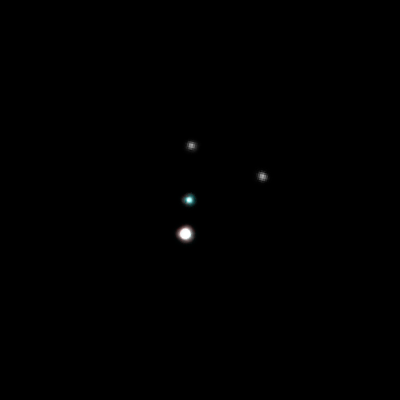

The Pluto system on May 18, 2005

These Hubble Space Telescope images, taken by the Advanced Camera for Surveys, reveal Pluto, its large moon Charon, and the planet's two new candidate satellites.

Credit: NASA, ESA, H. Weaver (JHU/APL), A. Stern (SwRI), and the Hubble Space Telescope Pluto Companion Search Team